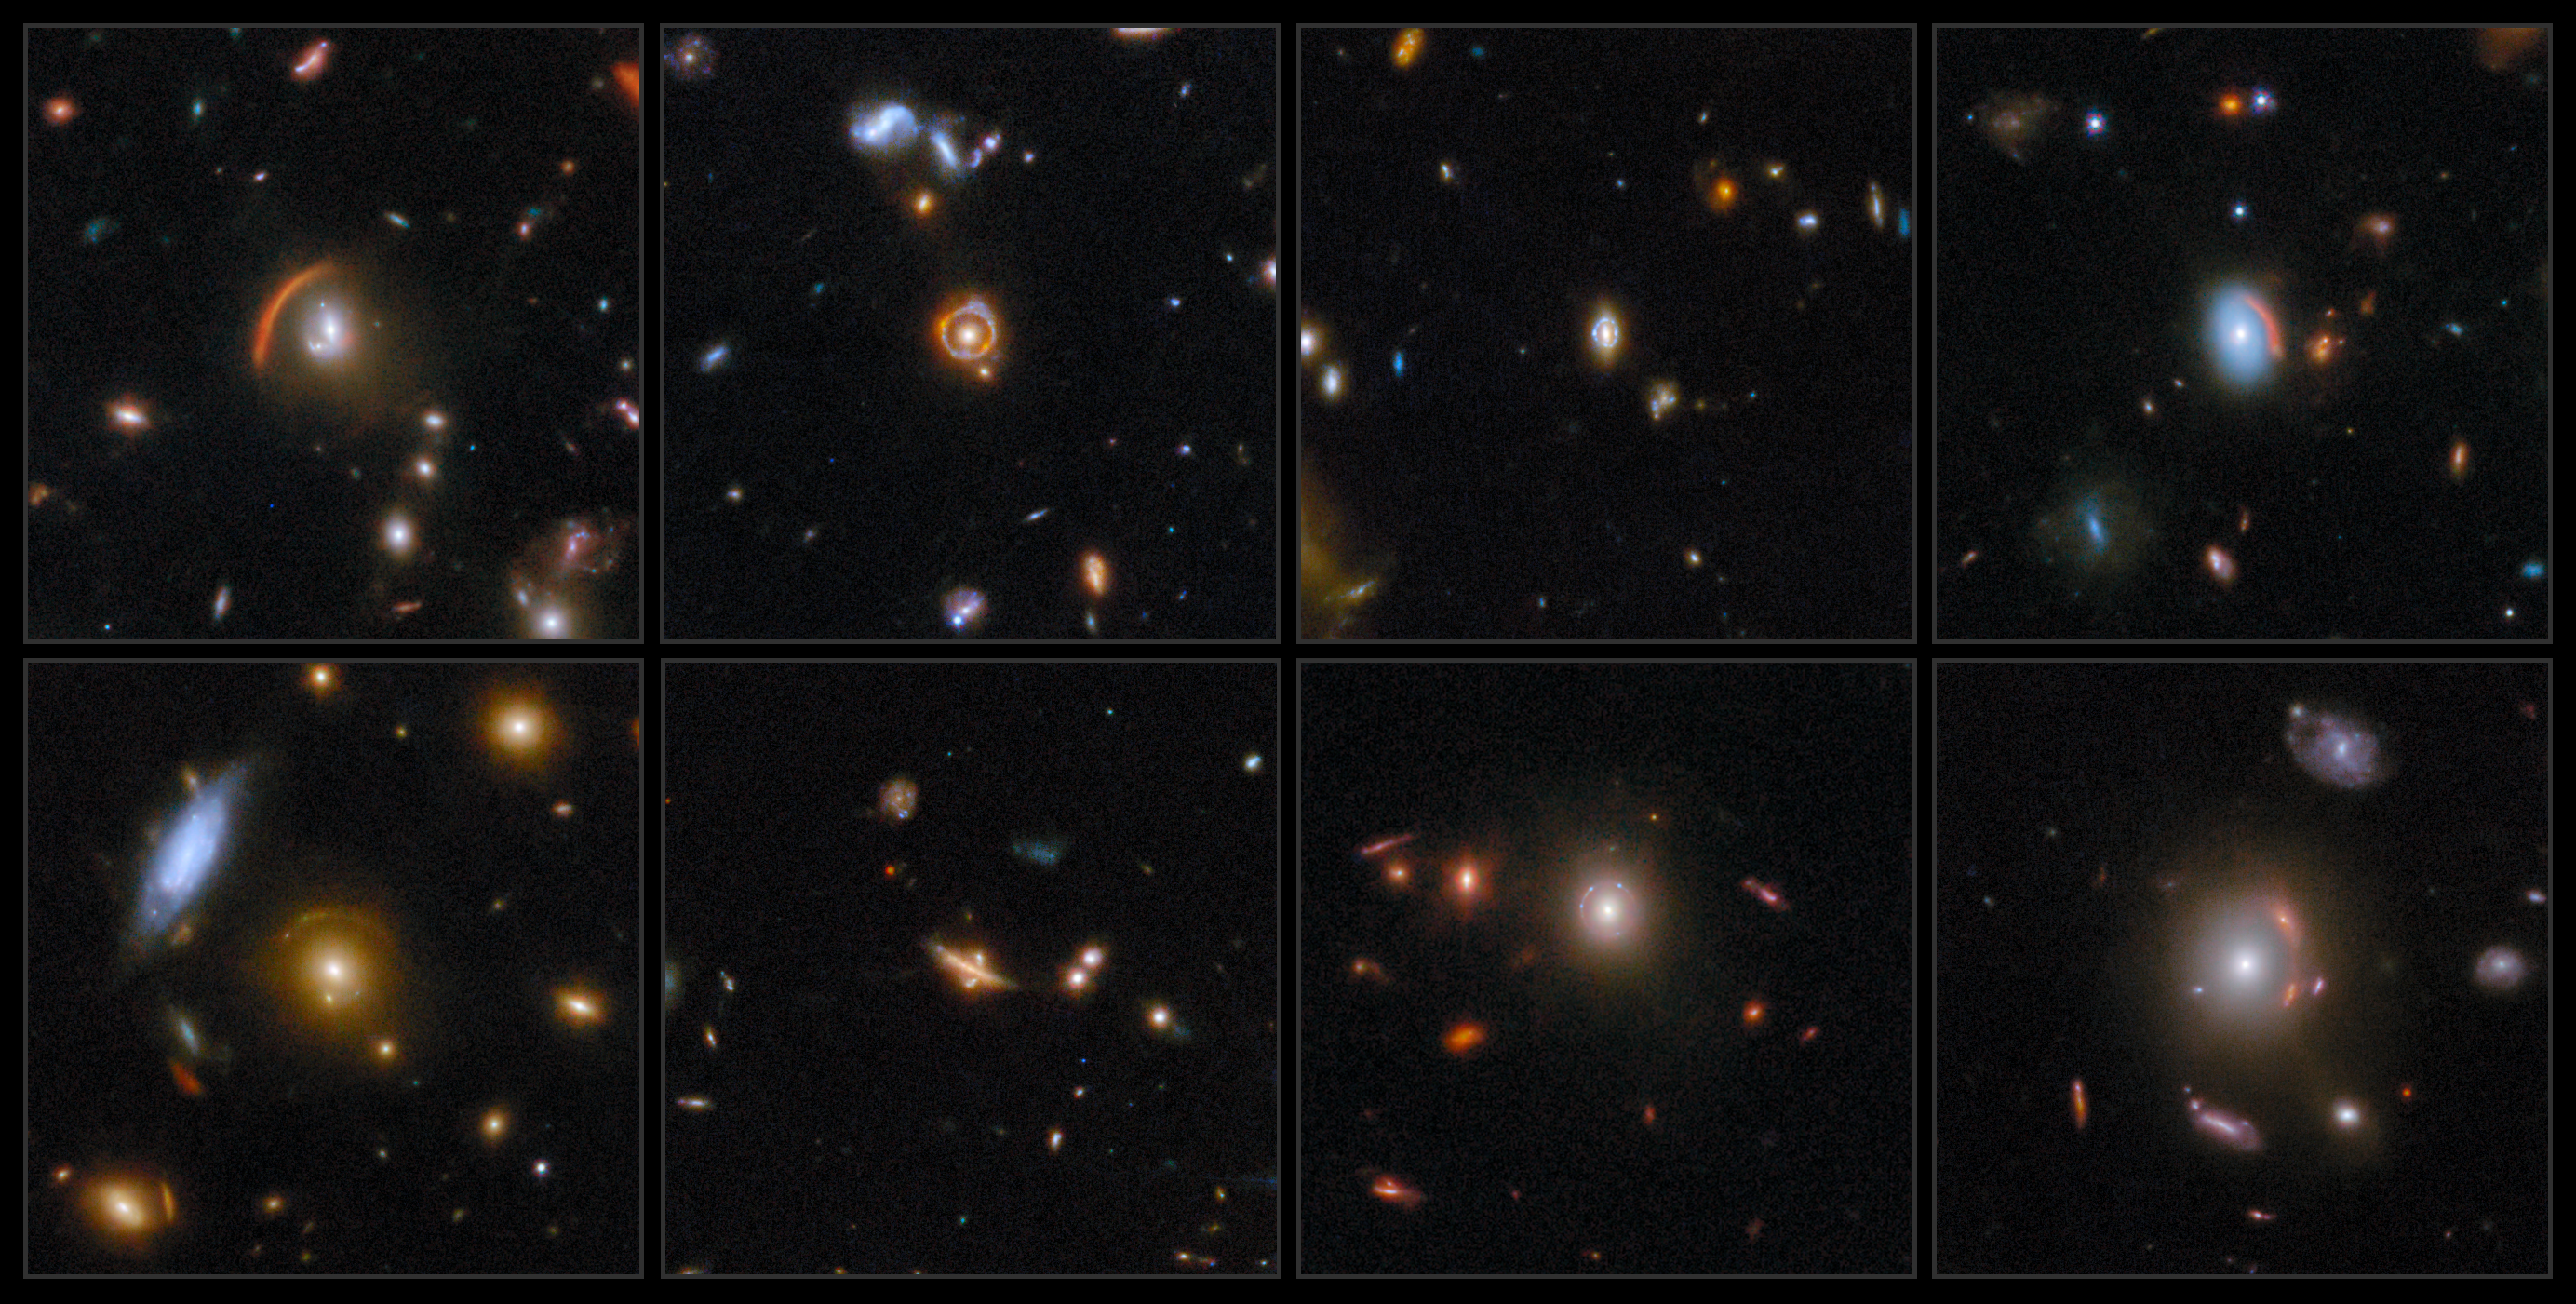

Webb brings cosmic lenses into focus

This ESA/Webb Picture of the Month shows eight stunning examples of gravitational lensing. Gravitational lensing, which was first predicted by Einstein, occurs because massive objects like galaxies and clusters of galaxies dramatically warp the fabric of spacetime. When a massive foreground object lines up just so with a background galaxy, the light from the background galaxy bends as it navigates the warped spacetime on its way to our telescopes.

Depending on how perfect the alignment is, the light from the background galaxy can be bent into an arc, a circle (a phenomenon called an ‘Einstein ring’) or even split into multiple images.

Arcs and circles are prevalent in these gravitationally lensed galaxies, which were identified in data from COSMOS-Web, a 255-hour Treasury programme (#1727). COSMOS-Web aims to understand the formation of the most massive galaxies in the Universe, identify galaxies that were present when the first stars and galaxies reionised the Universe’s hydrogen gas, and study the relationship between the mass of a galaxy’s stars and the mass of its galactic halo across cosmic time.

Using these data, researchers carried out the COSMOS-Web Lens Survey, or COWLS, to search for gravitational lenses. The researchers inspected more than 42 000 galaxies by eye and picked out more than 400 promising lensing candidates. This Picture of the Month feature presents a collage of eight of the most spectacular lenses identified by the research team.

This collection of gravitational lenses spans an incredible range of cosmic history. The foreground galaxies give us a glimpse of galactic life when the Universe was 2.7 to 8.9 billion years old. The background galaxies, whose shapes appear visibly distorted, stretch back even further, with one source nicknamed ‘the COSMOS-Web Ring’ (top row, left of centre) letting us peek all the way back to when the Universe was barely more than a billion years old. Several rarities appear in this collection, including an unusual case in which the galaxy acting as the gravitational lens is a flattened disc galaxy rather than an elliptical galaxy (bottom row, second from left).

These images demonstrate Webb’s ability to uncover and reveal never-before-seen details in gravitationally lensed galaxies. Some of the lensed galaxies were previously discovered with the NASA/ESA Hubble Space Telescope and are now seen by Webb in an entirely new light. Others, including those that are especially red due to either dust or distance, were first spotted by Webb. These discoveries open a unique window into the early days of the Universe and enable the study of exquisite details within distant galaxies like individual star clusters and supernovae.

Individual images of the lenses are also available. From left-to-right then top-to-bottom: COSJ100013+023424, COSJ100024+015334, COSJ100018+022138, COSJ100024+021749, COSJ095914+021219, COSJ100025+015245, COSJ095921+020638, and COSJ095593+023319.

Credit: ESA/Webb, NASA & CSA, G. Gozaliasl, A. Koekemoer, M. Franco